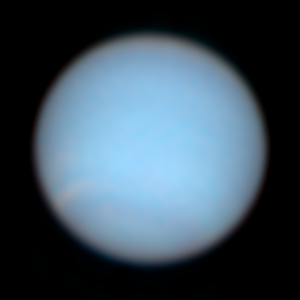

Neptune in Natural Colors

Neptune has a diameter of roughly 30,800 miles (49,600 km) at the equator.

Credit: NASA/ESA and Erich Karkoschka, University of Arizona